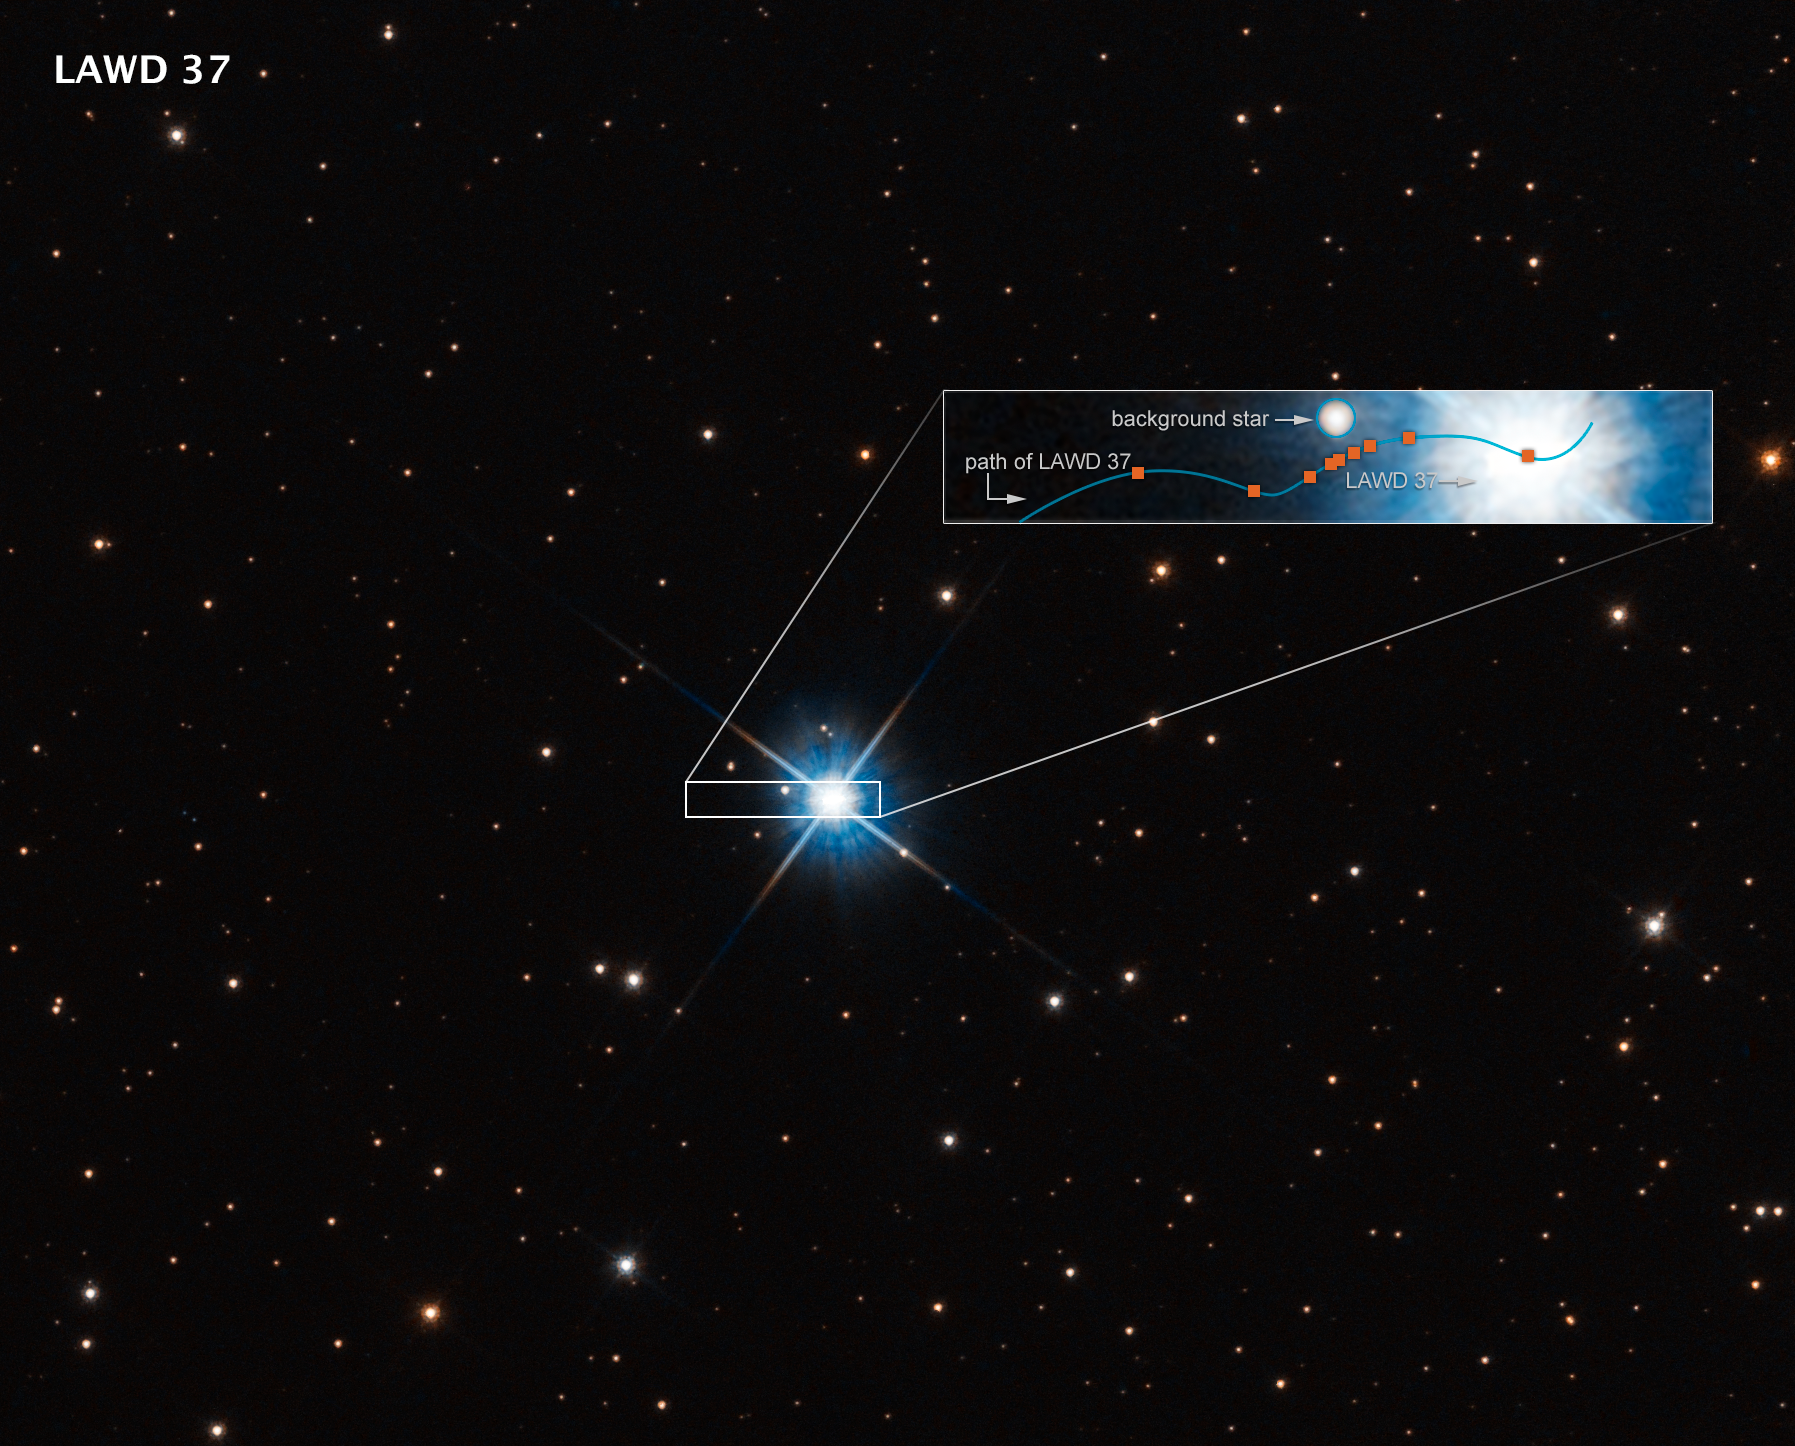

Hubble Uses Microlensing To Measure the Mass of a White Dwarf

This graphic shows how microlensing was used to measure the mass of a white dwarf star.

The dwarf, called LAWD 37, is a burned-out star in the centre of this Hubble Space Telescope image. Though its nuclear fusion furnace has shut down, trapped heat is sizzling on the surface at roughly 100 000 degrees Celsius, causing the stellar remnant to glow fiercely.

The inset box plots how the dwarf passed in front of a background star in 2019. The wavy blue line traces the dwarf’s apparent motion across the sky as seen from Earth. Though the dwarf is following a straight trajectory, the motion of Earth as it orbits the Sun imparts an apparent sinusoidal offset due to parallax. (The star is only 15 light-years away. Therefore, it is moving at a faster rate against the stellar background.)

As it passed by the fainter background star, the dwarf’s gravitational field warped space (as Einstein’s general theory of relativity predicted a century ago). And this deflection was precisely measured by Hubble’s extraordinary resolution. The amount of deflection yields a mass for the white dwarf of 56 percent our Sun’s mass and provides insights into theories of the structure and composition of white dwarfs. This is the first time astronomers have directly measured the mass of a single, isolated star other than our Sun.

Credit: NASA, ESA, P. McGill (Univ. of California, Santa Cruz and Univ. of Cambridge), K. Sahu (STScI), J. Depasquale (STScI)